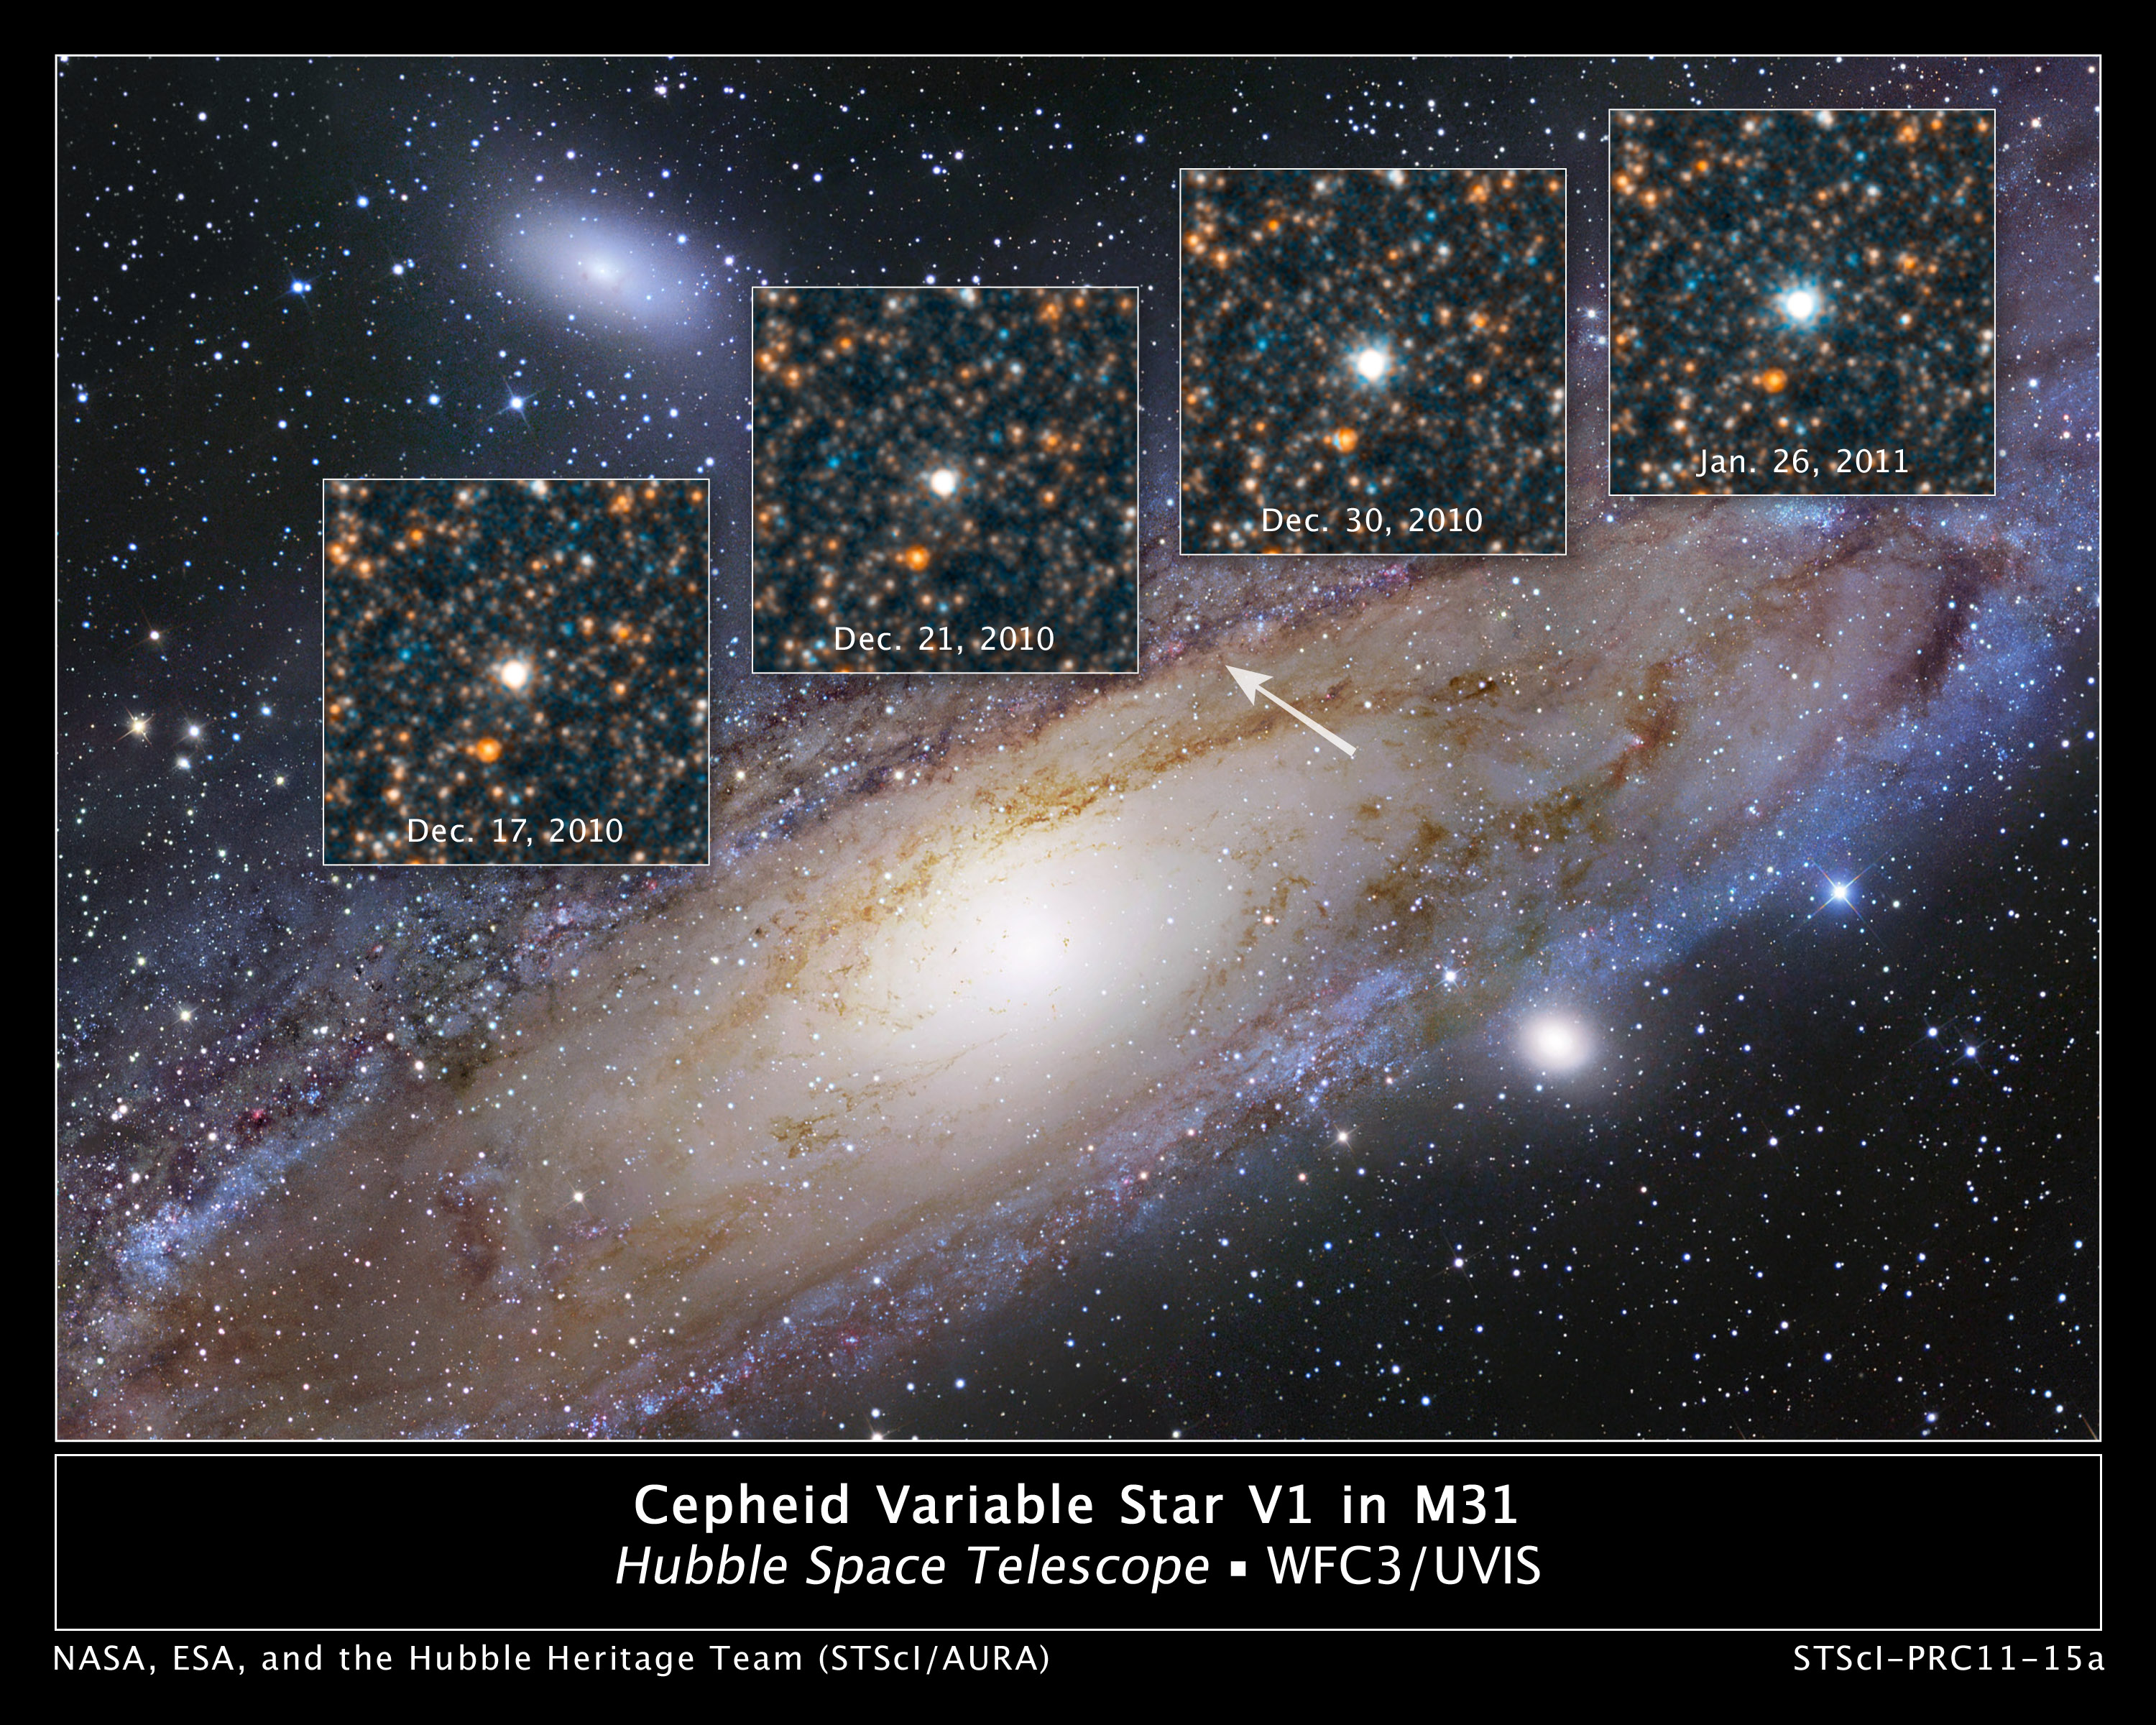

Hubble views the star that changed the Universe

Though the Universe is filled with billions upon billions of stars, the NASA/ESA Hubble Space Telescope has been trained on a single variable star that in 1923 altered the course of modern astronomy. And, at least one famous astronomer of the time lamented that the discovery had shattered his world view.

The star goes by the inauspicious name of Hubble variable number one, or V1, and resides two million light-years away in the outer regions of the neighbouring Andromeda galaxy, or M31. V1 is a special class of pulsating star called a Cepheid variable that can be used to make reliable measurements of large cosmic distances.

The star helped Edwin Hubble show that Andromeda lies beyond our galaxy. Prior to the discovery of V1 many astronomers, including Harlow Shapley, thought spiral nebulae, such as Andromeda, were part of our Milky Way galaxy. Others weren't so sure. In fact, Shapley and Heber Curtis held a public debate in 1920 over the nature of these nebulae. But it took Edwin Hubble's discovery just a few years later to settle the debate.

Hubble sent a letter, along with a light curve of V1, to Shapley telling him of his discovery. After reading the note, Shapley reportedly told a colleague, "Here is the letter that destroyed my Universe." The Universe became a much bigger place after Edwin Hubble's discovery.

In commemoration of this landmark observation, astronomers with the Space Telescope Science Institute's Hubble Heritage Project partnered with the American Association of Variable Star Observers (AAVSO) to study the star. AAVSO observers followed V1 for six months, producing a plot, or light curve, of the rhythmic rise and fall of the star's light. Based on this data, the Hubble Heritage team scheduled Hubble telescope time to capture Wide Field Camera 3 images of the star at its dimmest and brightest light levels.

The observations are being presented on 23 May at the meeting of the American Astronomical Society in Boston, Mass. (USA).

"This observation is a reminder that Cepheid variables are still relevant today," explains Max Mutchler of the Heritage team. "Astronomers are using them to measure distances to galaxies much farther away than Andromeda. They are the first rung on what astronomers call the cosmic distance ladder."

Copies of the photograph Edwin Hubble made in 1923 flew onboard space shuttle Discovery in 1990 on the mission that deployed Hubble. Two of the remaining five copies were part of space shuttle Atlantis's cargo in 2009 for NASA's fifth servicing mission to Hubble.

Edwin Hubble's observations of V1 became the critical first step in uncovering a larger, grander Universe. He went on to measure the distances to many galaxies beyond the Milky Way by finding Cepheid variables within them. The velocities of those galaxies, in turn, allowed him to determine that the Universe is expanding.

"V1 is the most important star in the history of cosmology," says astronomer Dave Soderblom of the Space Telescope Science Institute in Baltimore, Md. (USA), who proposed the V1 observations.

The space telescope that bears his namesake continues using Cepheids to refine the expansion rate of the Universe and probe galaxies far beyond Edwin Hubble's reach.

Credit: NASA, ESA and the Hubble Heritage Team (STScI/AURA)